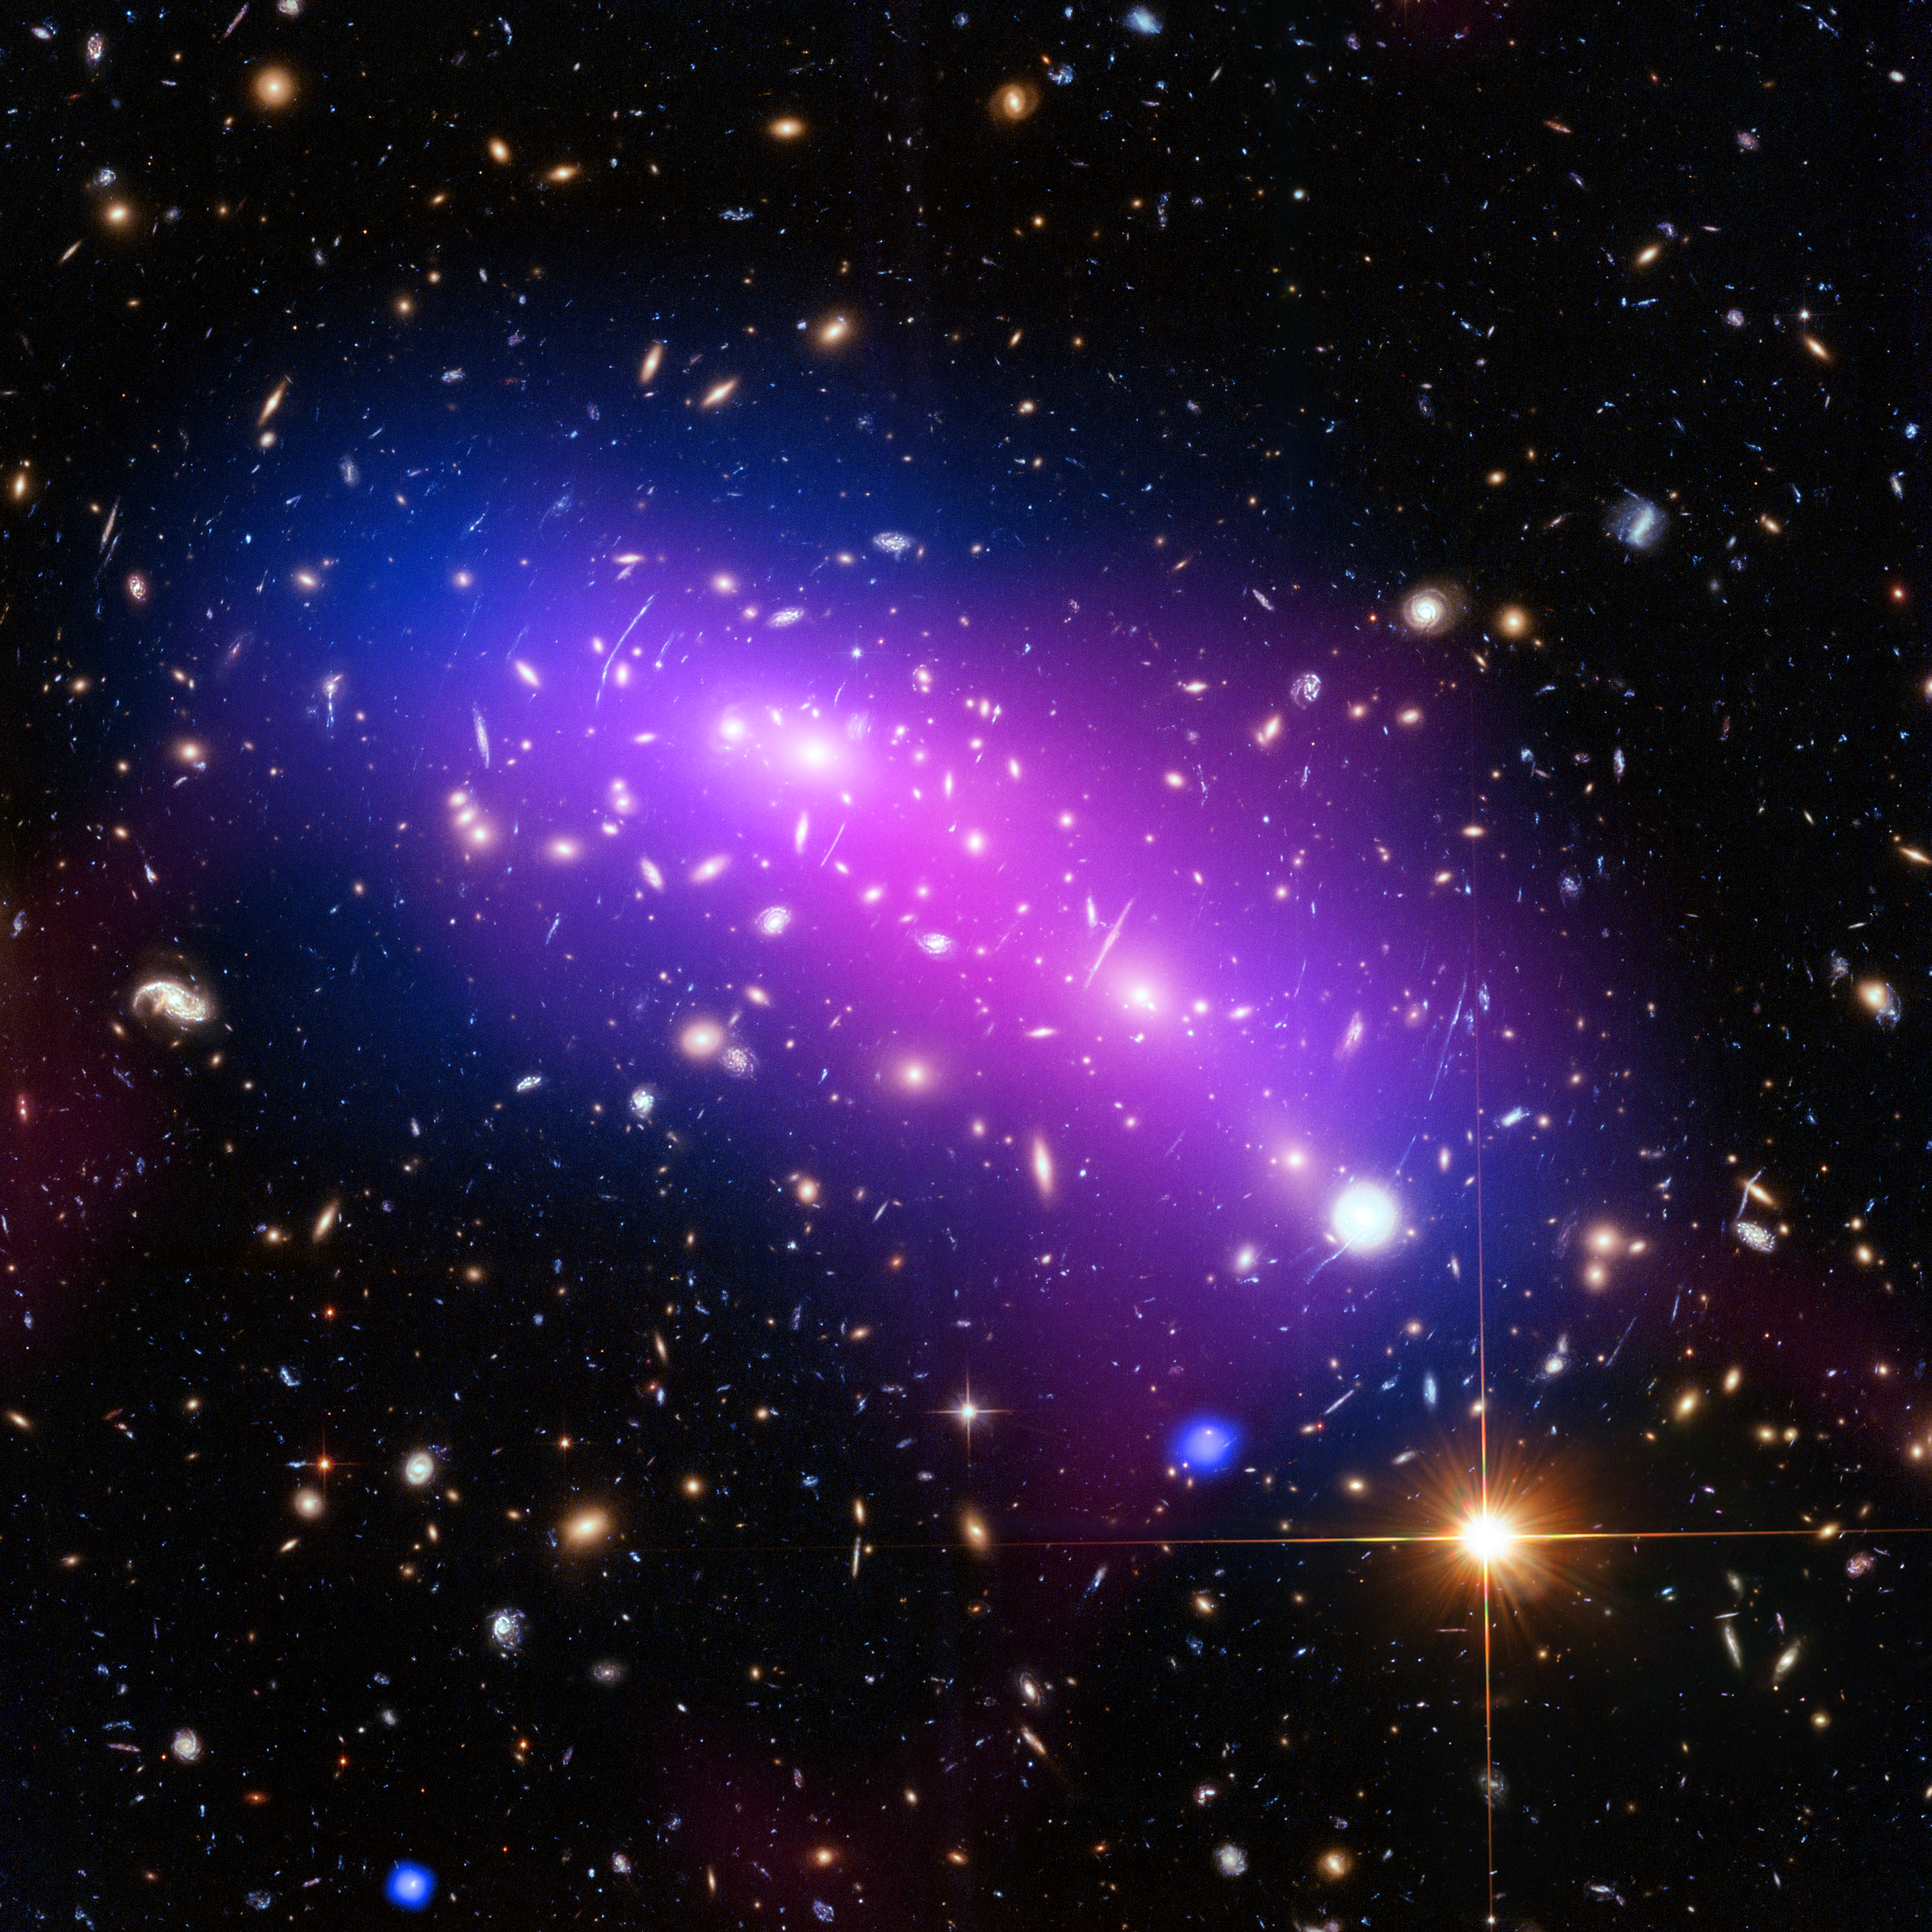

A cosmic kaleidoscope

At first glance, this cosmic kaleidoscope of purple, blue and pink offers a strikingly beautiful — and serene — snapshot of the cosmos. However, this multi-coloured haze actually marks the site of two colliding galaxy clusters, forming a single object known as MACS J0416.1-2403 (or MACS J0416 for short).

MACS J0416 is located about 4.3 billion light-years from Earth, in the constellation of Eridanus. This new image of the cluster combines data from three different telescopes: the NASA/ESA Hubble Space Telescope (showing the galaxies and stars), the NASA Chandra X-ray Observatory (diffuse emission in blue), and the NRAO Jansky Very Large Array (diffuse emission in pink). Each telescope shows a different element of the cluster, allowing astronomers to study MACS J0416 in detail.

As with all galaxy clusters, MACS J0416 contains a significant amount of dark matter, which leaves a detectable imprint in visible light by distorting the images of background galaxies. In this image, this dark matter appears to align well with the blue-hued hot gas, suggesting that the two clusters have not yet collided; if the clusters had already smashed into one another, the dark matter and gas would have separated. MACS J0416 also contains other features — such as a compact core of hot gas — that would likely have been disrupted had a collision already occurred.

Together with five other galaxy clusters, MACS J0416 is playing a leading role in the Hubble Frontier Fields programme, for which this data was obtained. Owing to its huge mass, the cluster is in fact bending the light of background objects, acting as a magnifying lens. Astronomers can use this phenomenon to find galaxies that existed only hundreds of million years after the big bang.

For more information on both Frontier Fields and the phenomenon of gravitational lensing, see Hubblecast 90: The final frontier.

Credit: NASA, ESA, CXC, NRAO/AUI/NSF, STScI, and G. Ogrean (Stanford University)
Acknowledgment: NASA, ESA, and J. Lotz (STScI), and the HFF team